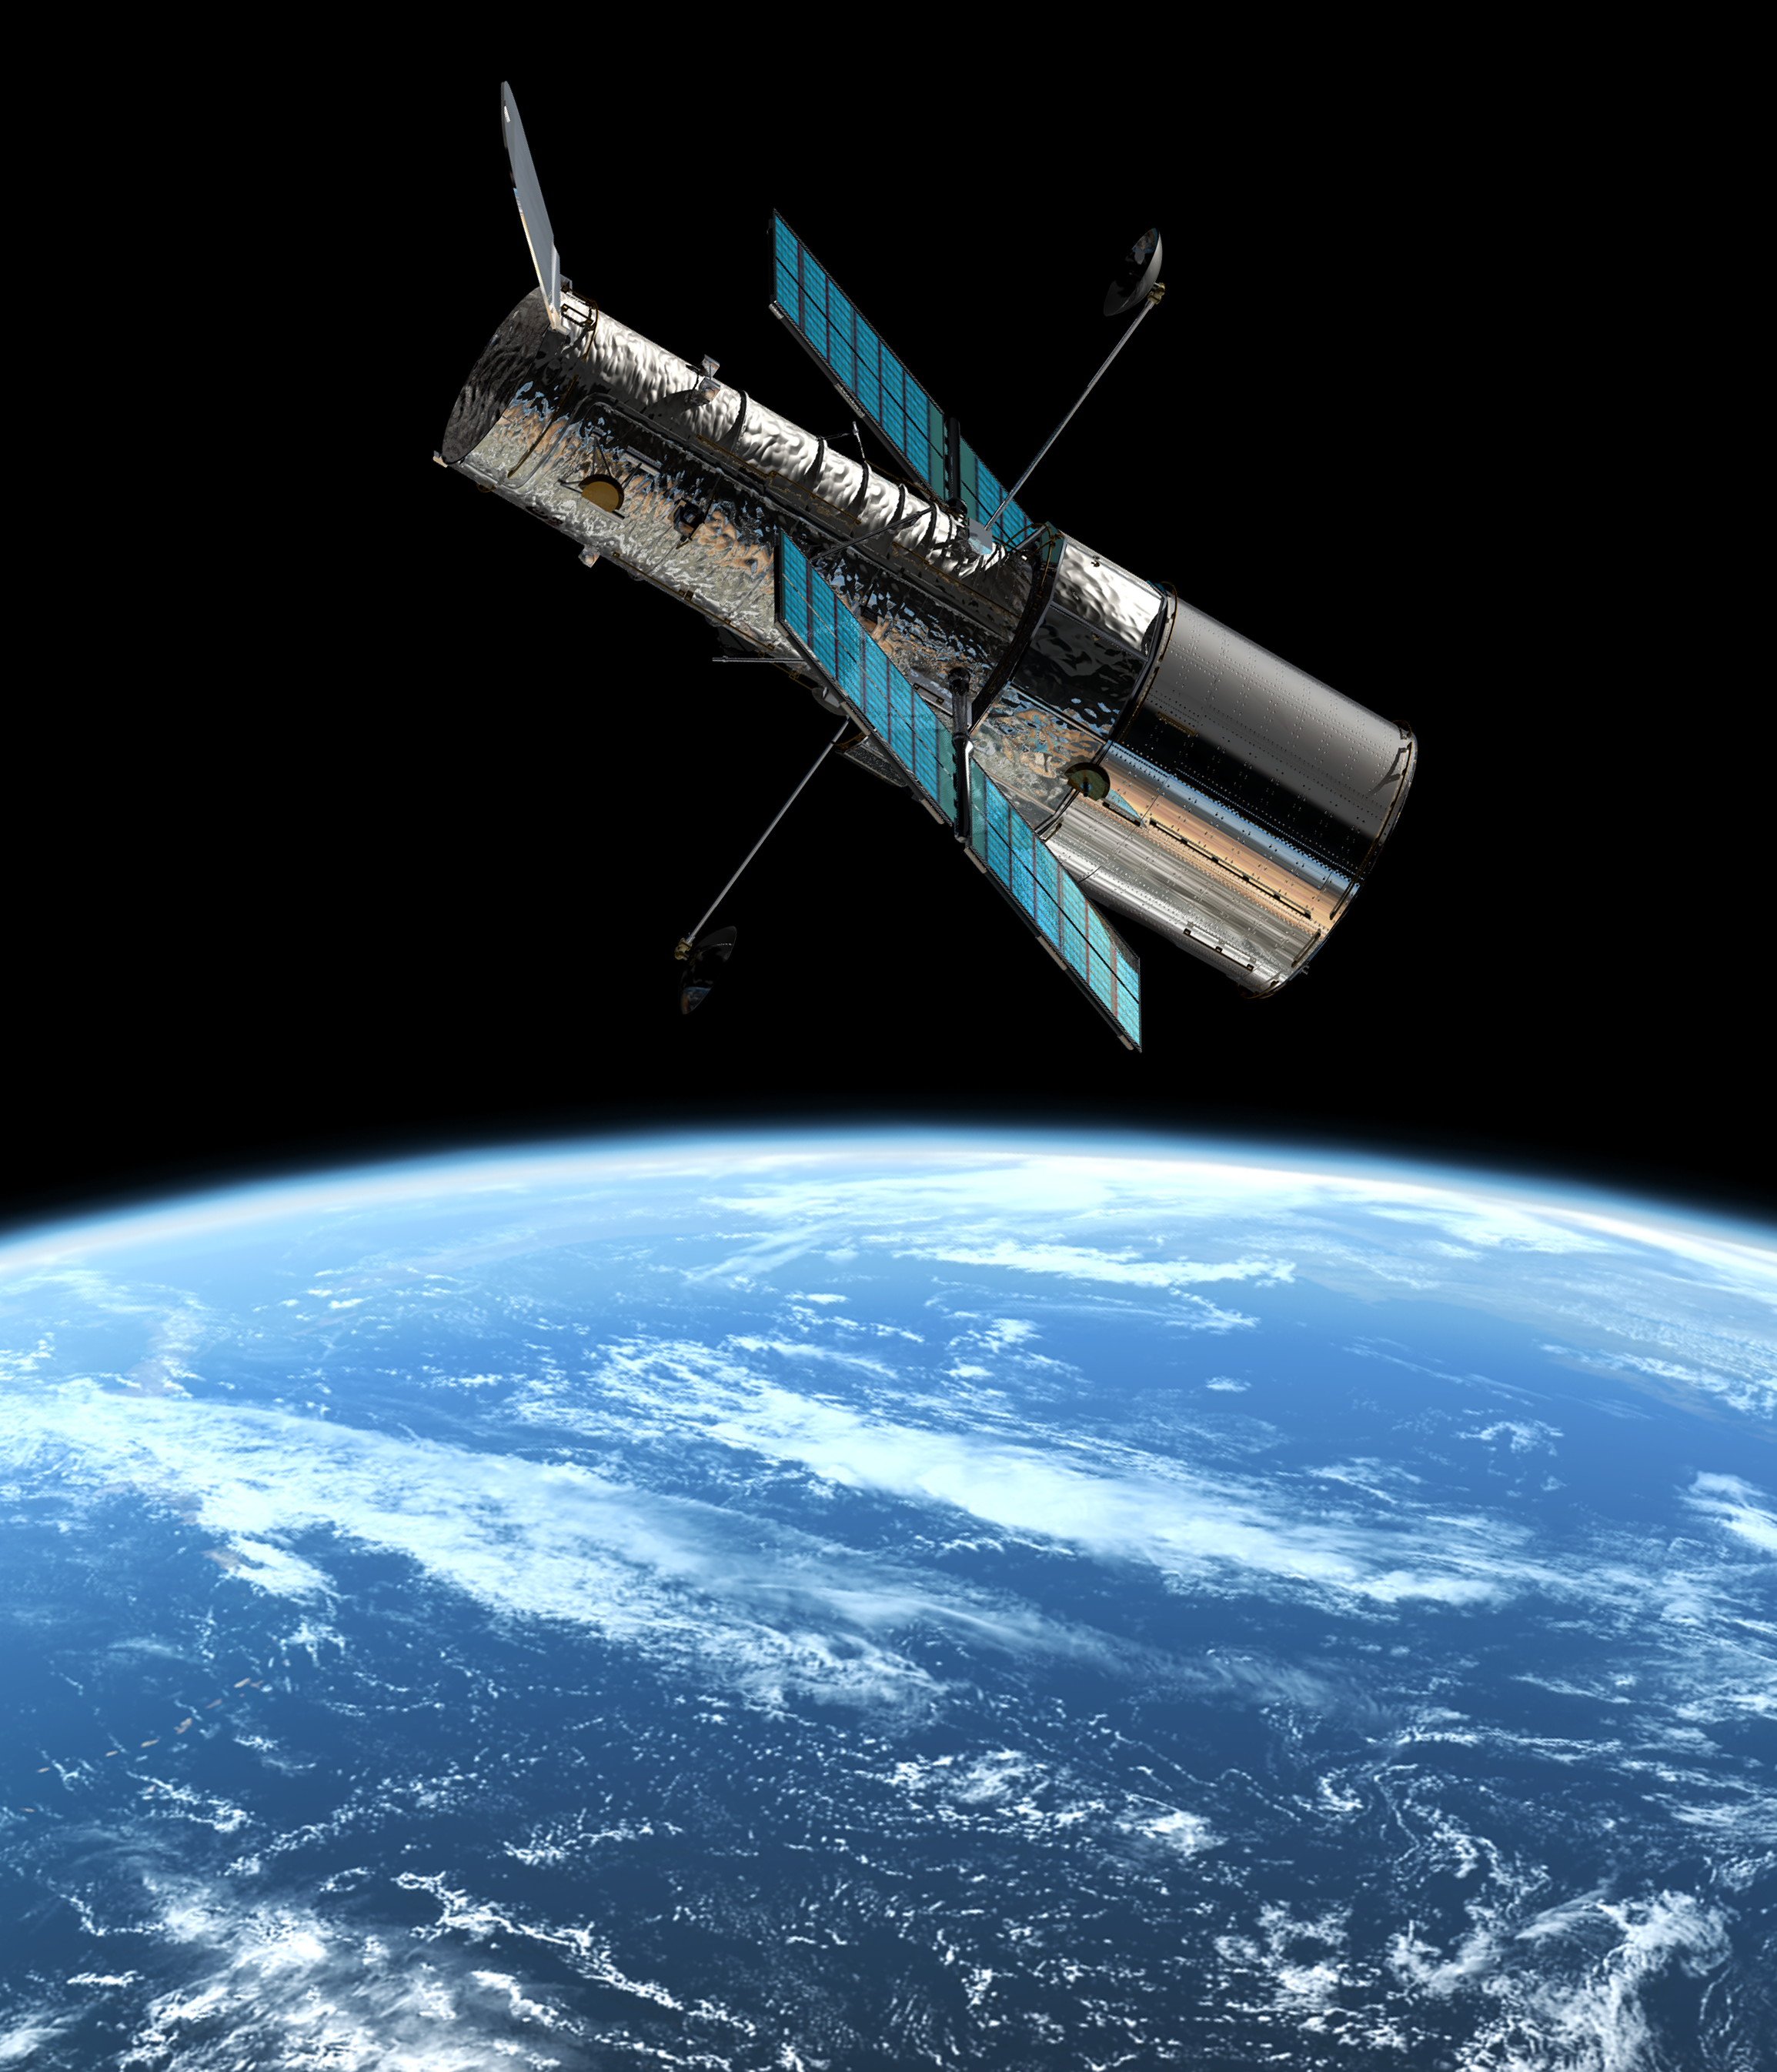

The Hubble Space Telescope in orbit

This image shows an artist's impression of the ESA/NASA/ESA Hubble Space Telescope in its orbit 600 km above the Earth.

Credit: European Space Agency